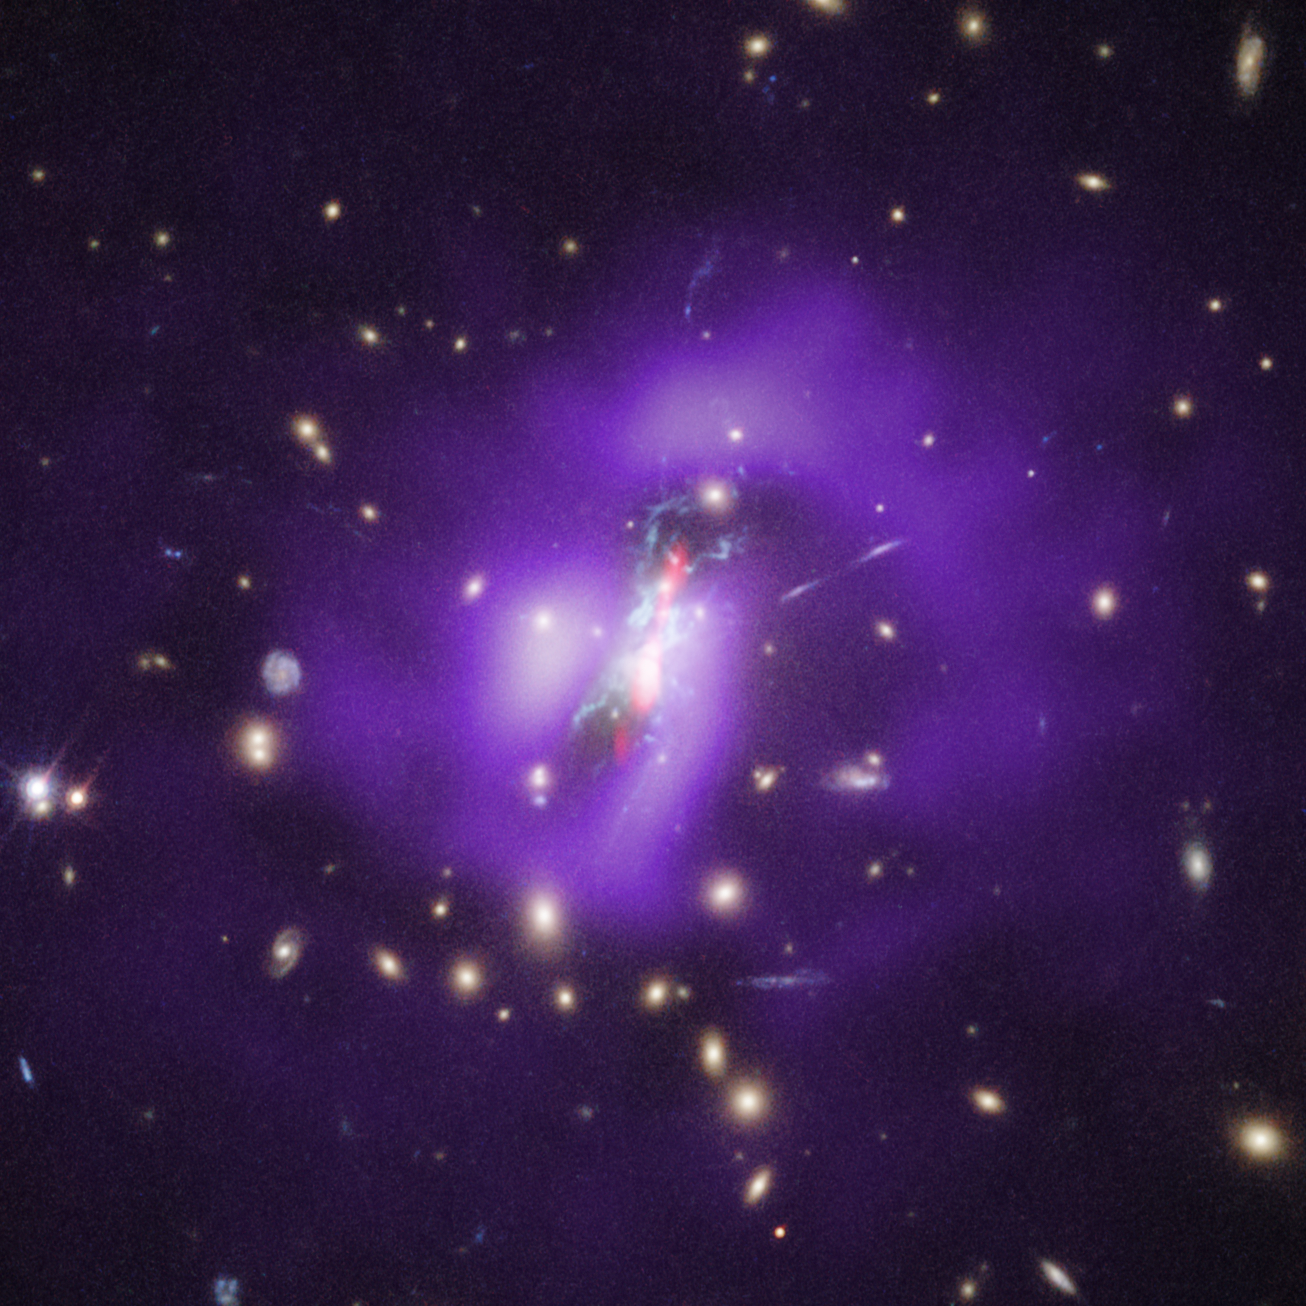

A Weakened Black Hole Allows Its Galaxy to Awaken

The Phoenix galaxy cluster contains the first confirmed supermassive black hole that is unable to prevent large numbers of stars from forming in the core of the galaxy cluster where it resides.

Optical observations with the NASA/ESA Hubble Space Telescope provide evidence for further cooling of gas near the center of the Phoenix Cluster. Ten billion solar masses of cooler gas are located along filaments to the north and south of the black hole, which likely originate from outbursts by the supermassive black hole located in the center of the image.

This image was captured using observations from various telescopes. Optical light data from Hubble show galaxies (in yellow), and filaments of cooler gas where stars are forming (in light blue).

Credit: NASA, ESA, and NRAO